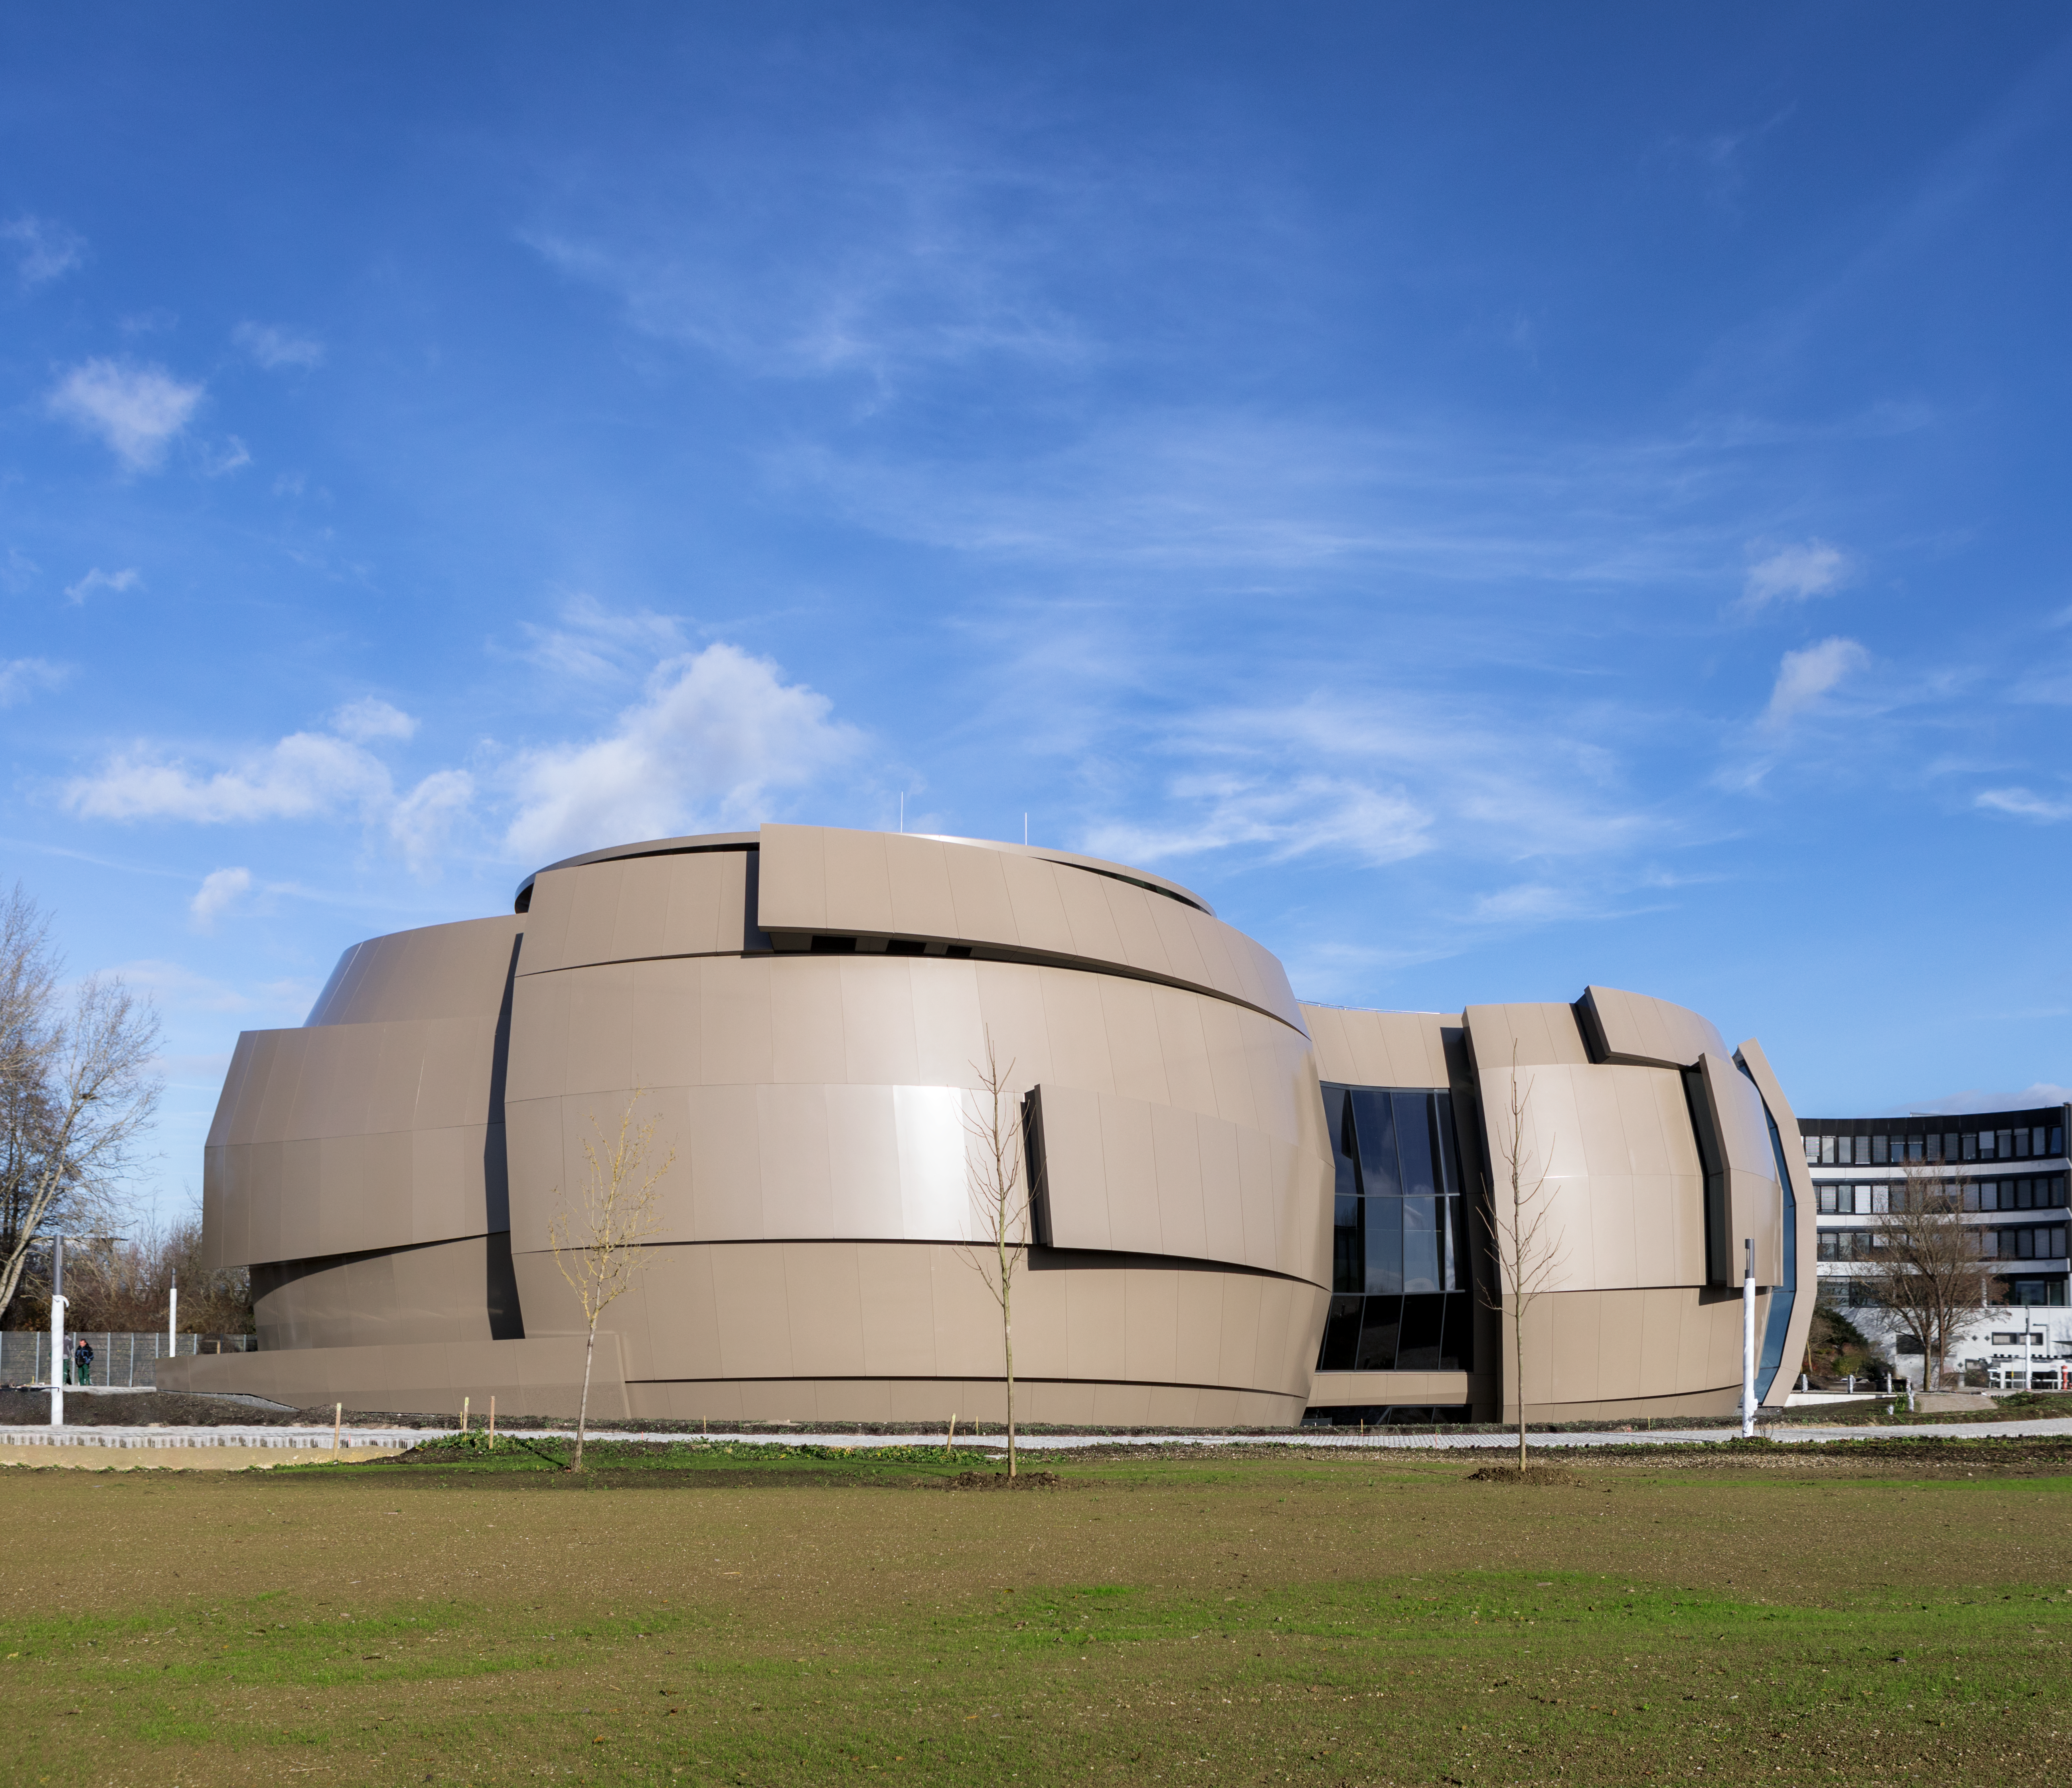

ESO Supernova external view

External view of the ESO Supernova Planetarium & Visitor Centre. This photo was taken in November 2017, a few months before its inauguration.

Credit: ESO/P. Horálek